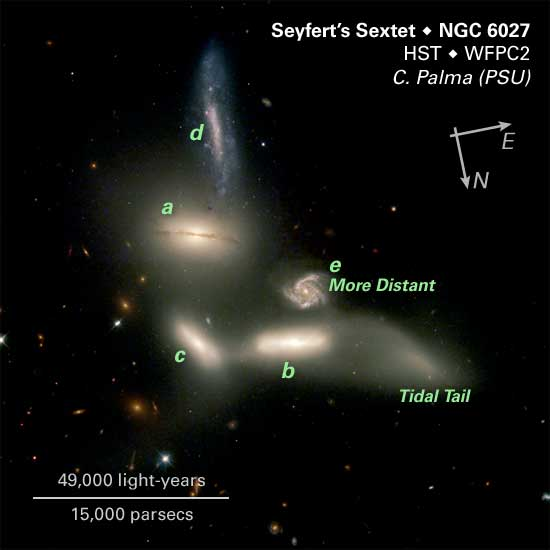

Seyfert's Sextet, Annotated Image

The NASA/ESA Hubble Space Telescope is witnessing a grouping of galaxies engaging in a slow dance of destruction that will last for billions of years. The galaxies are so tightly packed together that gravitational forces are beginning to rip stars from them and distort their shapes. Those same gravitational forces eventually could bring the galaxies together to form one large galaxy.

Credit: NASA/ESA, J. English (U. Manitoba), S. Hunsberger, S. Zonak, J. Charlton, S. Gallagher (PSU), and L. Frattare (STScI)